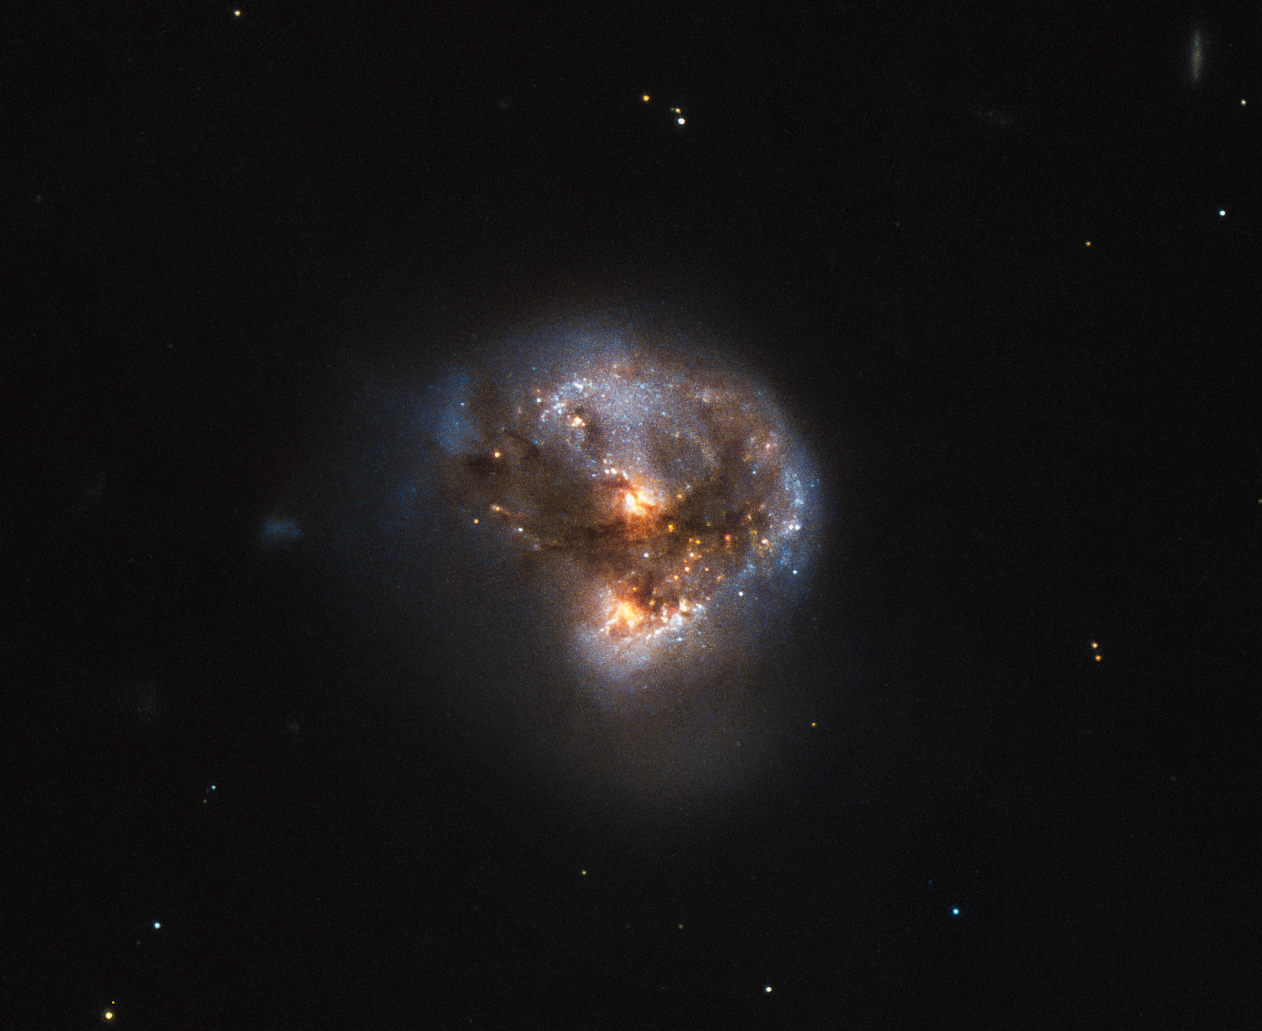

A cosmic megamaser

This galaxy has a far more exciting and futuristic classification than most — it is a megamaser. Megamasers are intensely bright, around 100 million times brighter than the masers found in galaxies like the Milky Way. The entire galaxy essentially acts as an astronomical laser that beams out microwave emission rather than visible light (hence the ‘m’ replacing the ‘l’).

This megamaser is named IRAS 16399-0937, and is located over 370 million light-years from Earth. This NASA/ESA Hubble Space Telescope image belies the galaxy’s energetic nature, instead painting it as a beautiful and serene cosmic rosebud. The image comprises observations captured across various wavelengths by two of Hubble’s instruments: the Advanced Camera for Surveys (ACS), and the Near Infrared Camera and Multi-Object Spectrometer (NICMOS).

NICMOS’s superb sensitivity, resolution, and field of view gave astronomers the unique opportunity to observe the structure of IRAS 16399-0937 in detail. They found that IRAS 16399-0937 hosts a double nucleus — the galaxy’s core is thought to be formed of two separate cores in the process of merging. The two components, named IRAS 16399N and IRAS 16399S for the northern and southern parts respectively, sit over 11 000 light-years apart. However, they are both buried deep within the same swirl of cosmic gas and dust and are interacting, giving the galaxy its peculiar structure.

The nuclei are very different. IRAS 16399S appears to be a starburst region, where new stars are forming at an incredible rate. IRAS 16399N, however, is something known as a LINER nucleus (Low Ionization Nuclear Emission Region), which is a region whose emission mostly stems from weakly-ionised or neutral atoms of particular gases. The northern nucleus also hosts a black hole with some 100 million times the mass of the Sun!

Credit: ESA/Hubble & NASA Acknowledgement: Judy Schmidt (geckzilla)